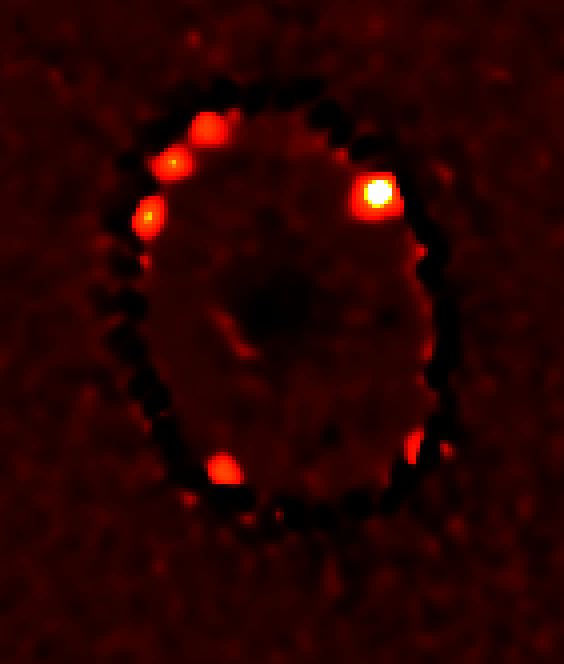

Four Bright Knots of Superheated Gas in Supernova 1987A Ring

Image processing is used to emphasize four new bright knots of superheated gas discovered in the February 2 Hubble observations. The brightest knot, at the far right, was seen in 1997. Astronomers have been waiting several years to see more of the ring light-up as the supernova shockwave smashes into it. This is the first definitive sign of the full onset of a dramatic and violent collision which will continue over the next few years, rejuvenating SN1987A as a powerful source of X-ray and radio emissions.

Credit: NASA/ESA, Peter Challis and Robert Kirshner (Harvard-Smithsonian Center for Astrophysics), Peter Garnavich (University of Notre Dame) and the SINS collaboration.